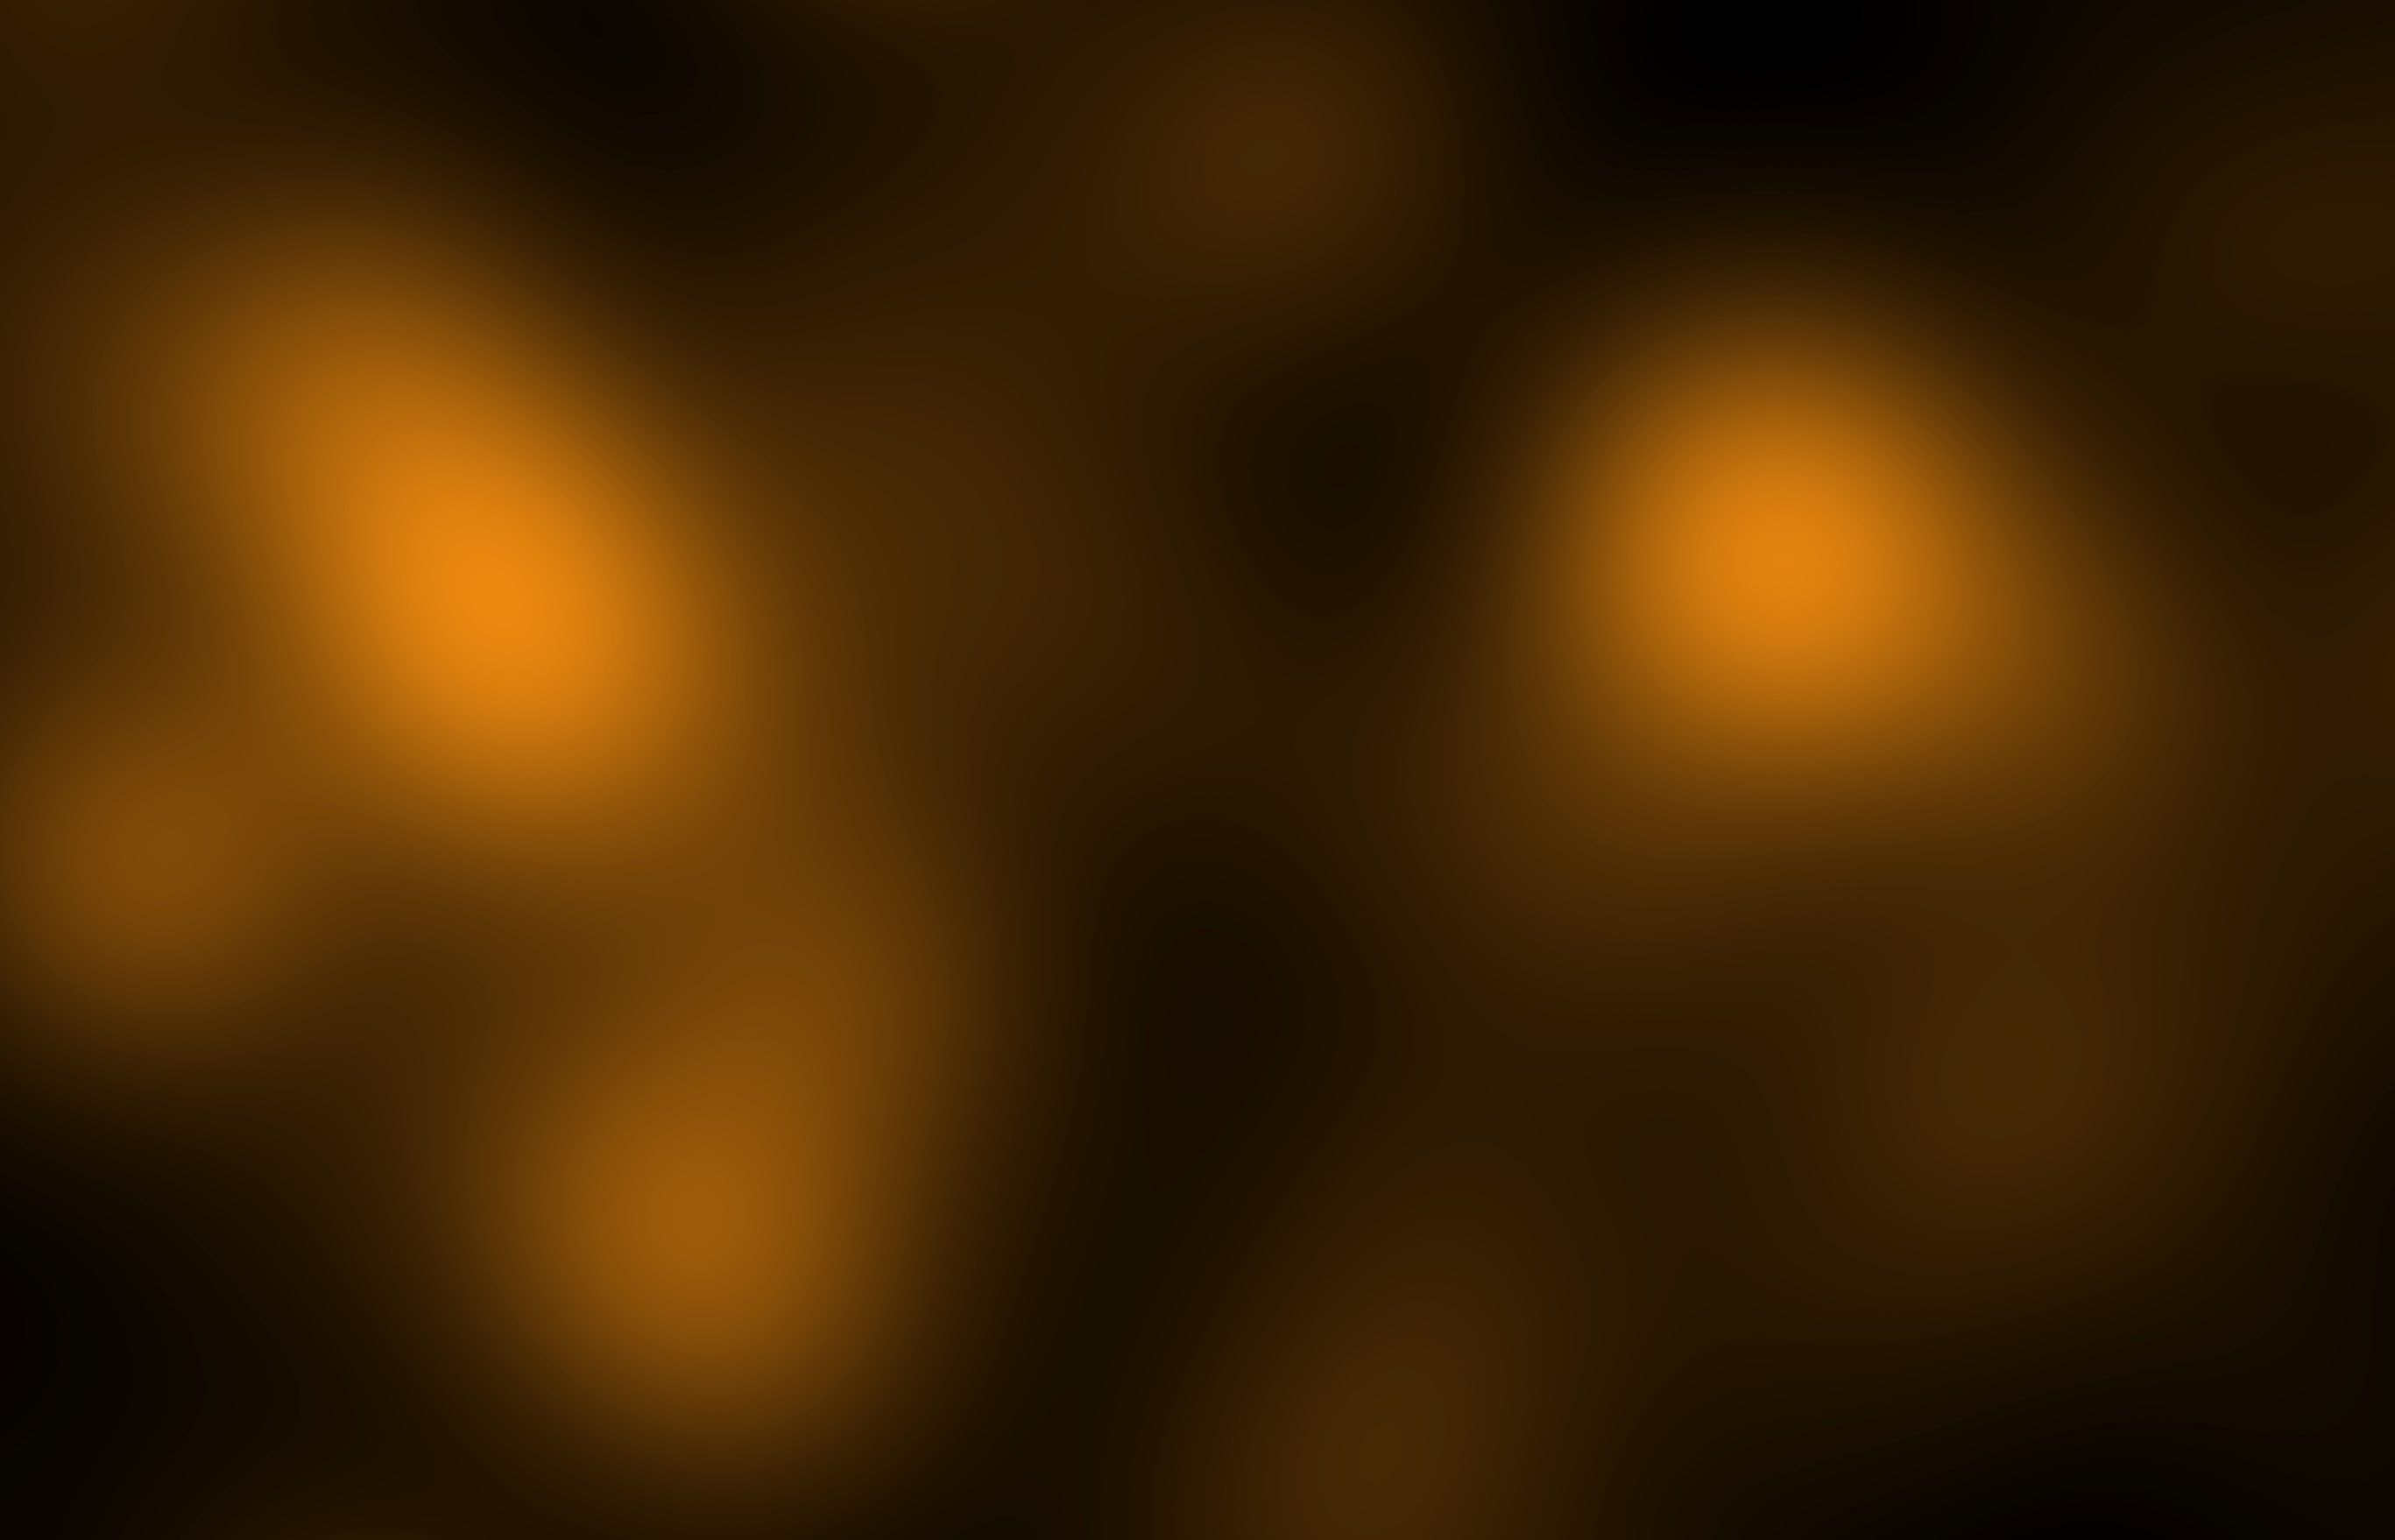

Galaxy cluster Abell 520's luminosity (CFHT)

This image shows the concentration of starlight at the core of merging galaxy cluster Abell 520. The map was derived from observations by the Canada-France-Hawaii Telescope in Hawaii.

Abell 520 resides 2.4 billion light-years away.

Credit: NASA, ESA, CFHT, M.J. Jee (University of California, Davis), and A. Mahdavi (San Francisco State University)